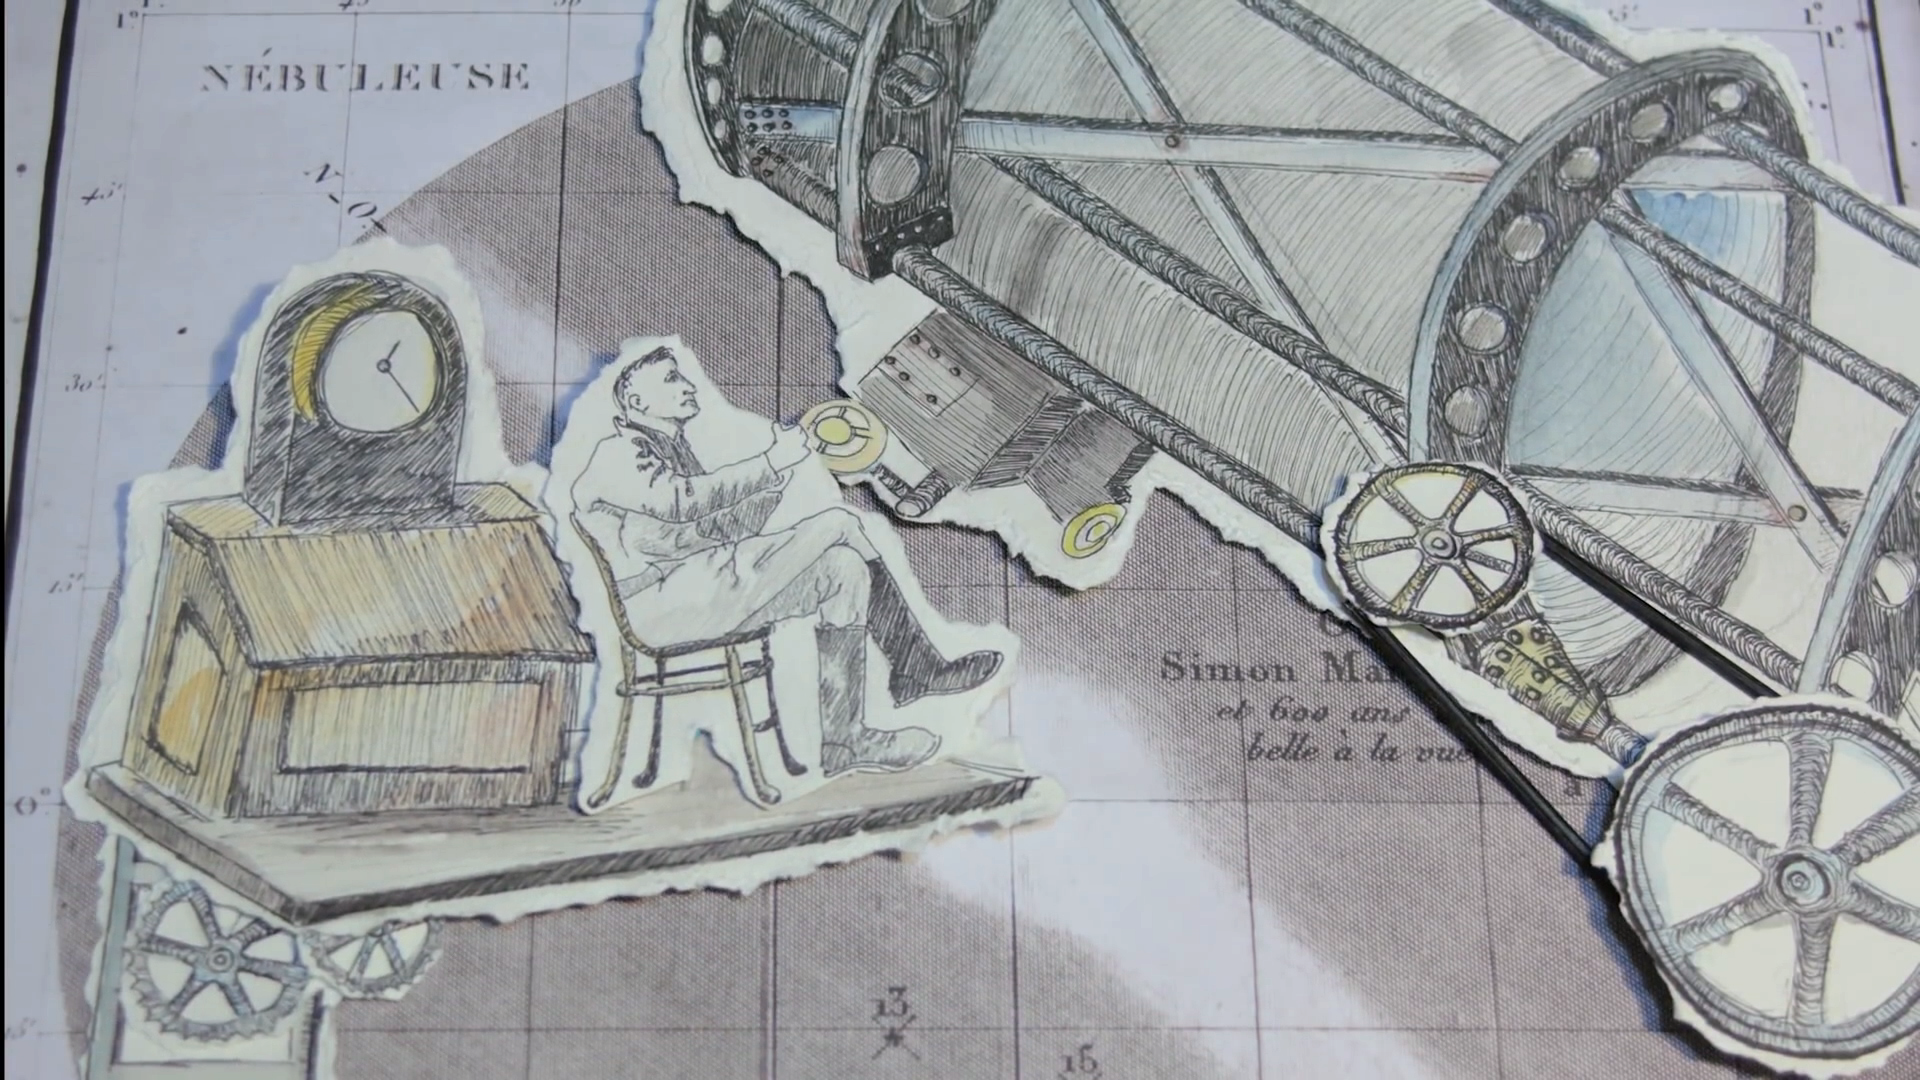

Still from: Hubblecast episode 85: ode to Hubble

This is a still from Hubblecast 85, which presents the two winning videos of the Ode to Hubble competition.

Credit: NASA & ESA